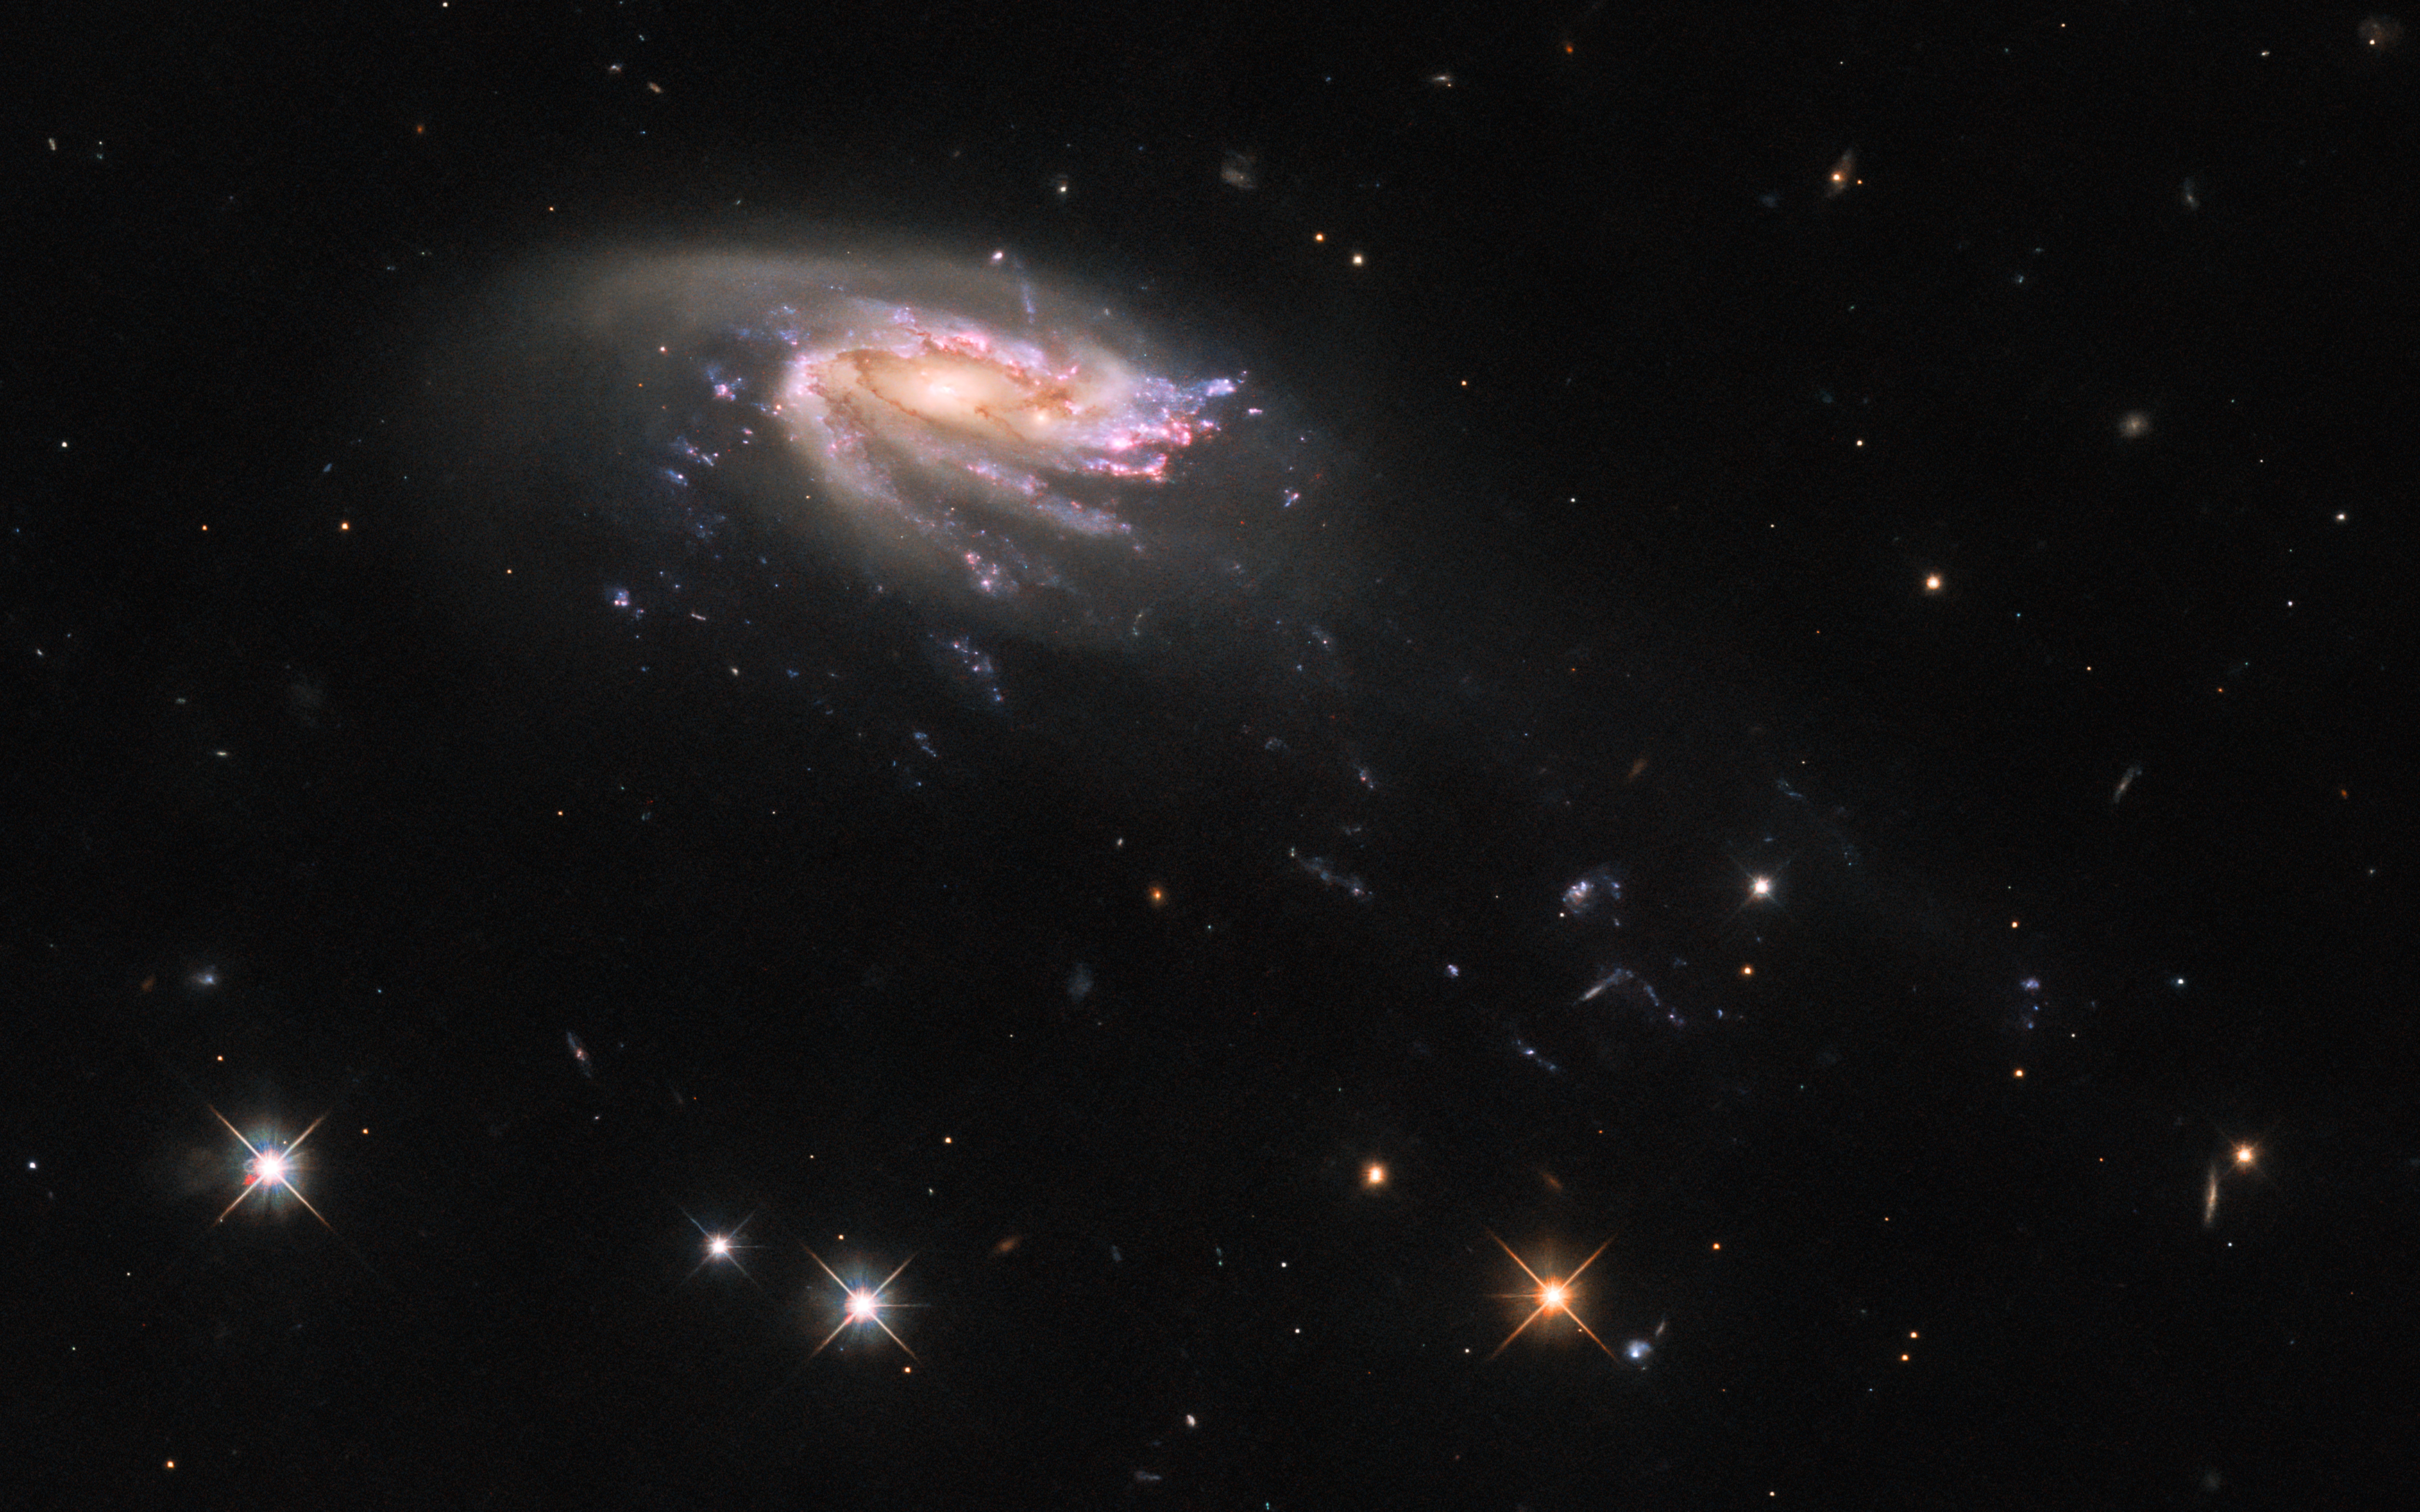

Under the Sea

The jellyfish galaxy JO206 trails across this image from the NASA/ESA Hubble Space Telescope, showcasing a colourful star-forming disc surrounded by a pale, luminous cloud of dust. A handful of bright stars with criss-cross diffraction spikes stand out against an inky black backdrop at the bottom of the image. JO206 lies over 700 million light-years from Earth in the constellation Aquarius, and this image of the galaxy is the sixth and final instalment in a series of observations of jellyfish galaxies. Some of Hubble's other observations of these peculiar galaxies — which range from grandiose to ghostly — are available here.

Jellyfish galaxies are so-called because of their resemblance to their aquatic namesakes. In this image, the disc of JO206 is trailed by long tendrils of bright star formation that stretch towards the bottom right of this image, just as jellyfish trail tentacles behind them. The tendrils of jellyfish galaxies are formed by the interaction between galaxies and the intra-cluster medium, a tenuous superheated plasma that pervades galaxy clusters. As galaxies move through galaxy clusters they ram into the intracluster medium, which strips gas from the galaxies and draws it into the long tendrils of star formation.

The tentacles of jellyfish galaxies give astronomers a unique opportunity to study star formation under extreme conditions, far from the influence of the main disc of the galaxy. Surprisingly, Hubble revealed that there are no striking differences between star formation in the discs of jellyfish galaxies and star formation in their tentacles, which suggests the environment of newly-formed stars has only a minor influence on their formation.

Credit: ESA/Hubble & NASA, M. Gullieuszik and the GASP team